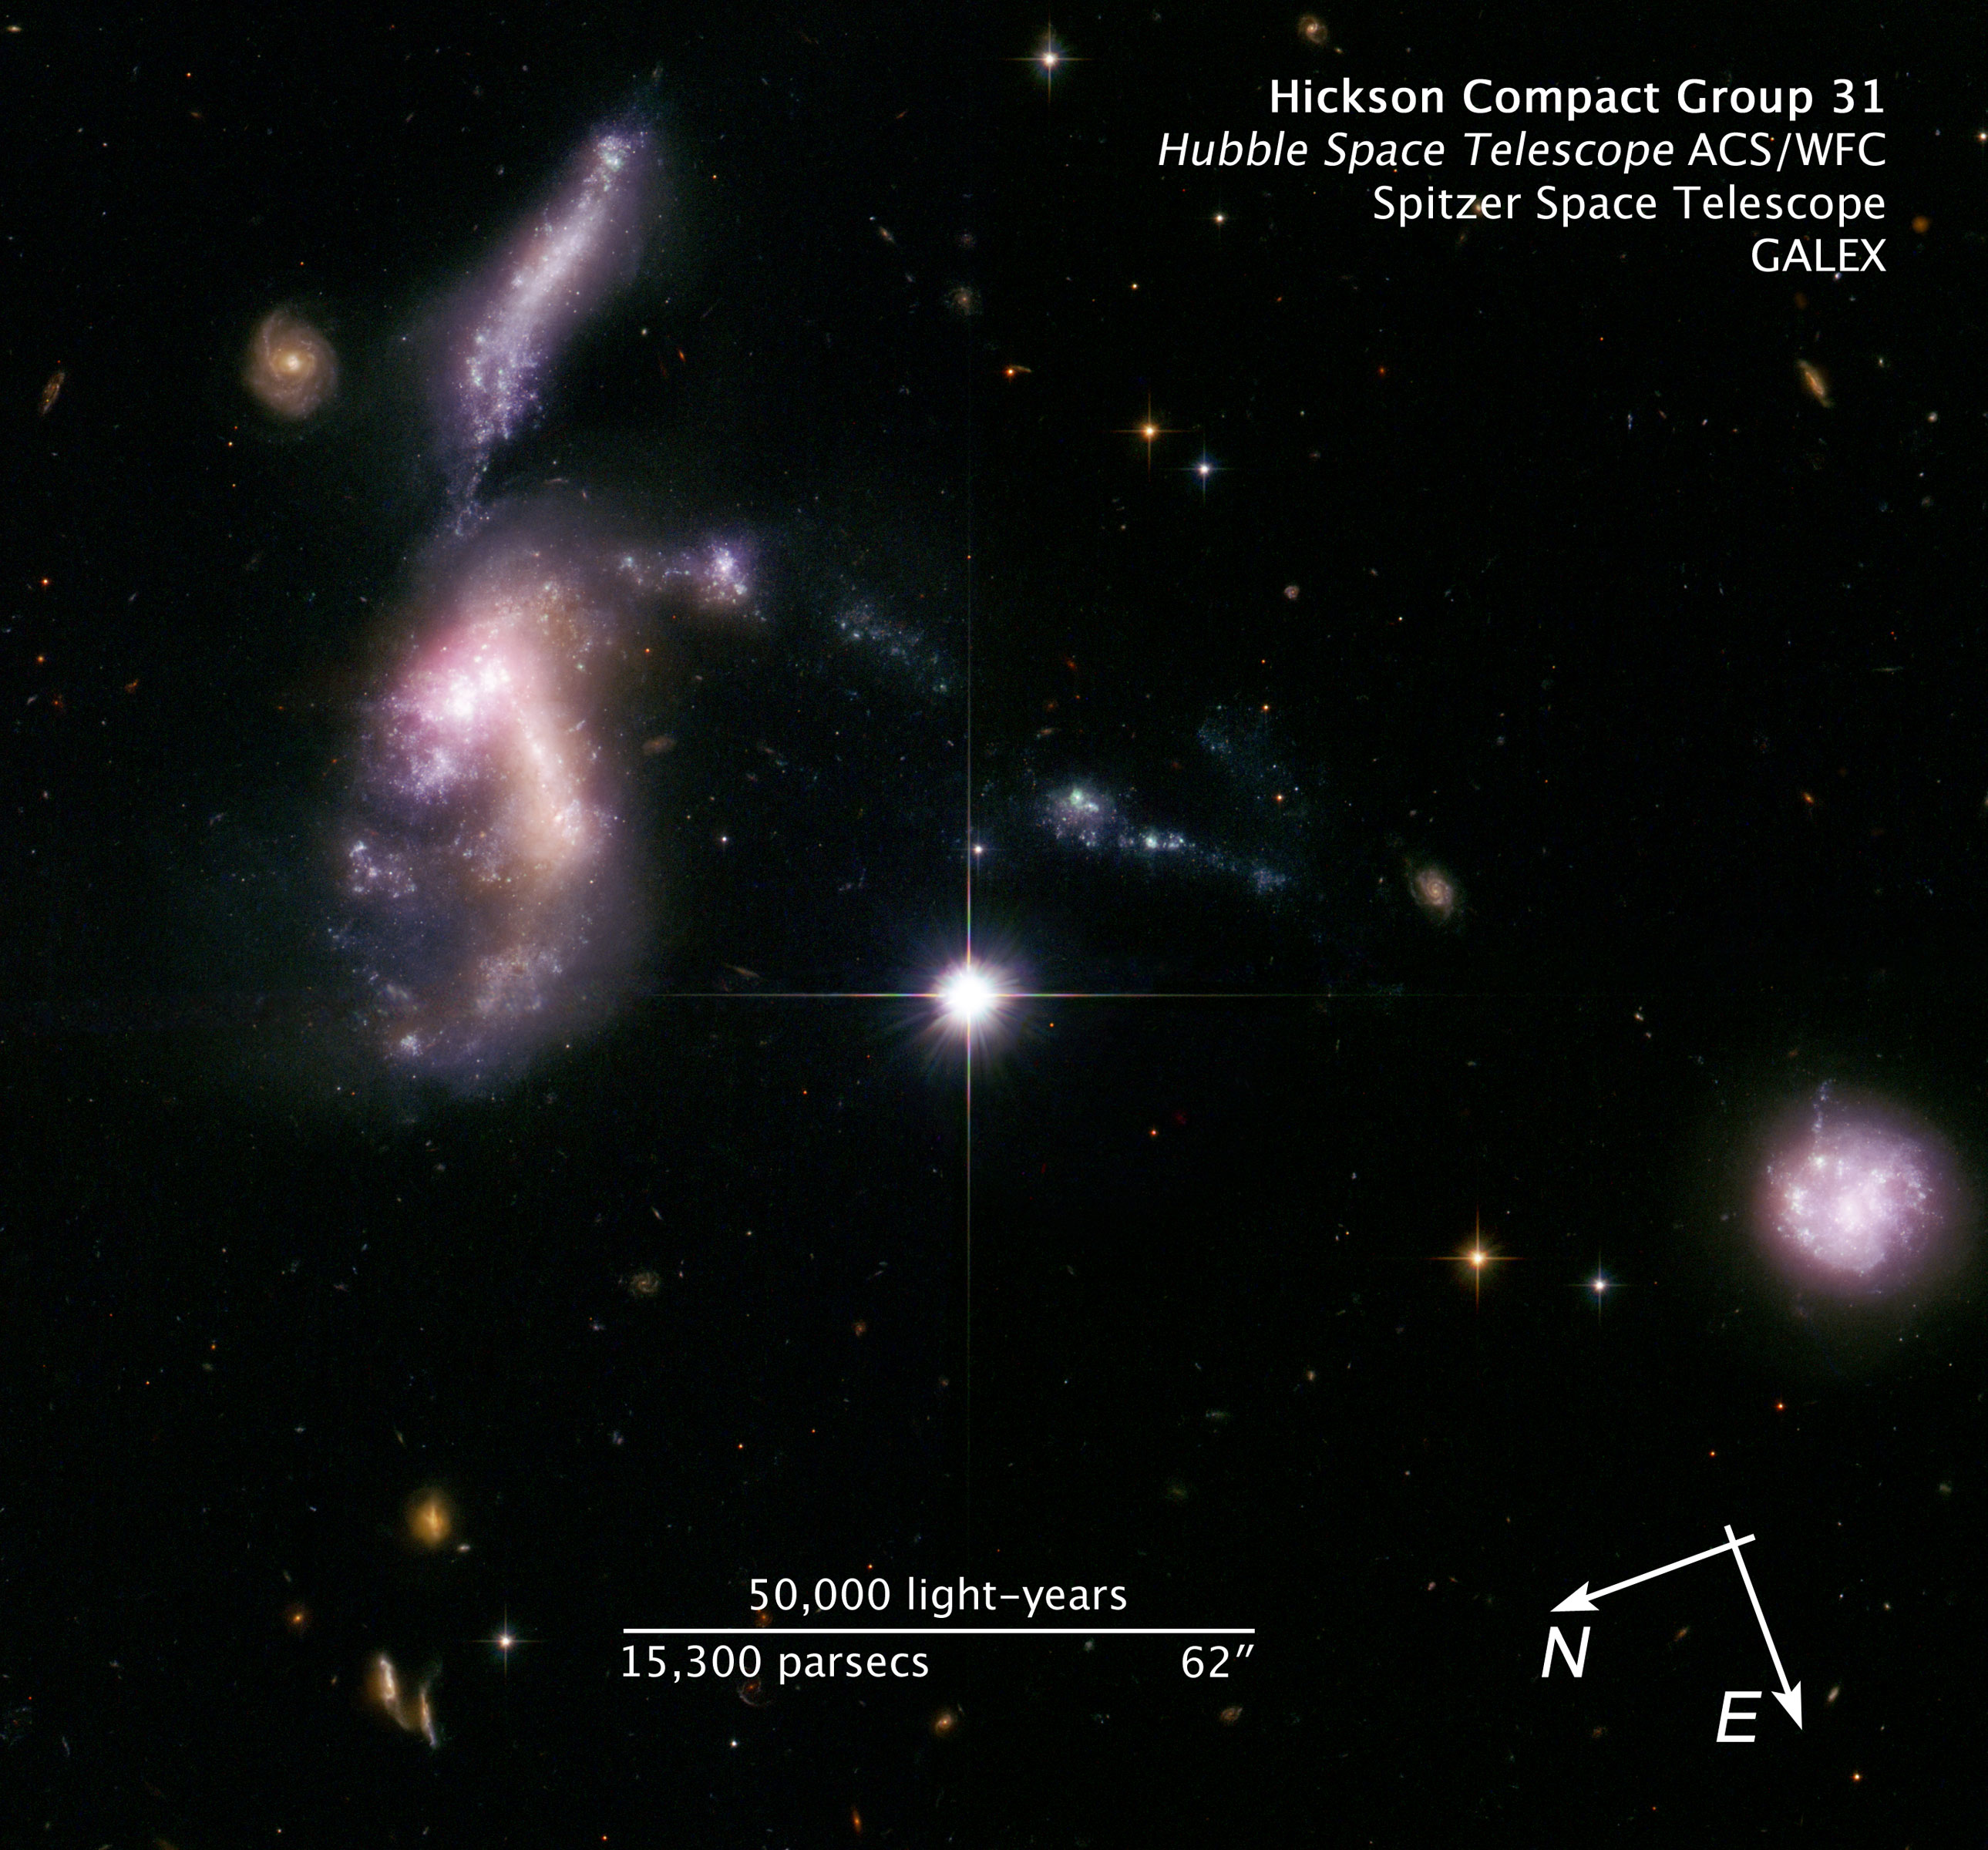

Compass and scale image for HCG 31

Compass and scale image for HCG 31

Credit: NASA, ESA and Z. Levay (STScI). Science Credit: NASA, ESA, S. Gallagher (The University of Western Ontario) and J. English (University of Manitoba)